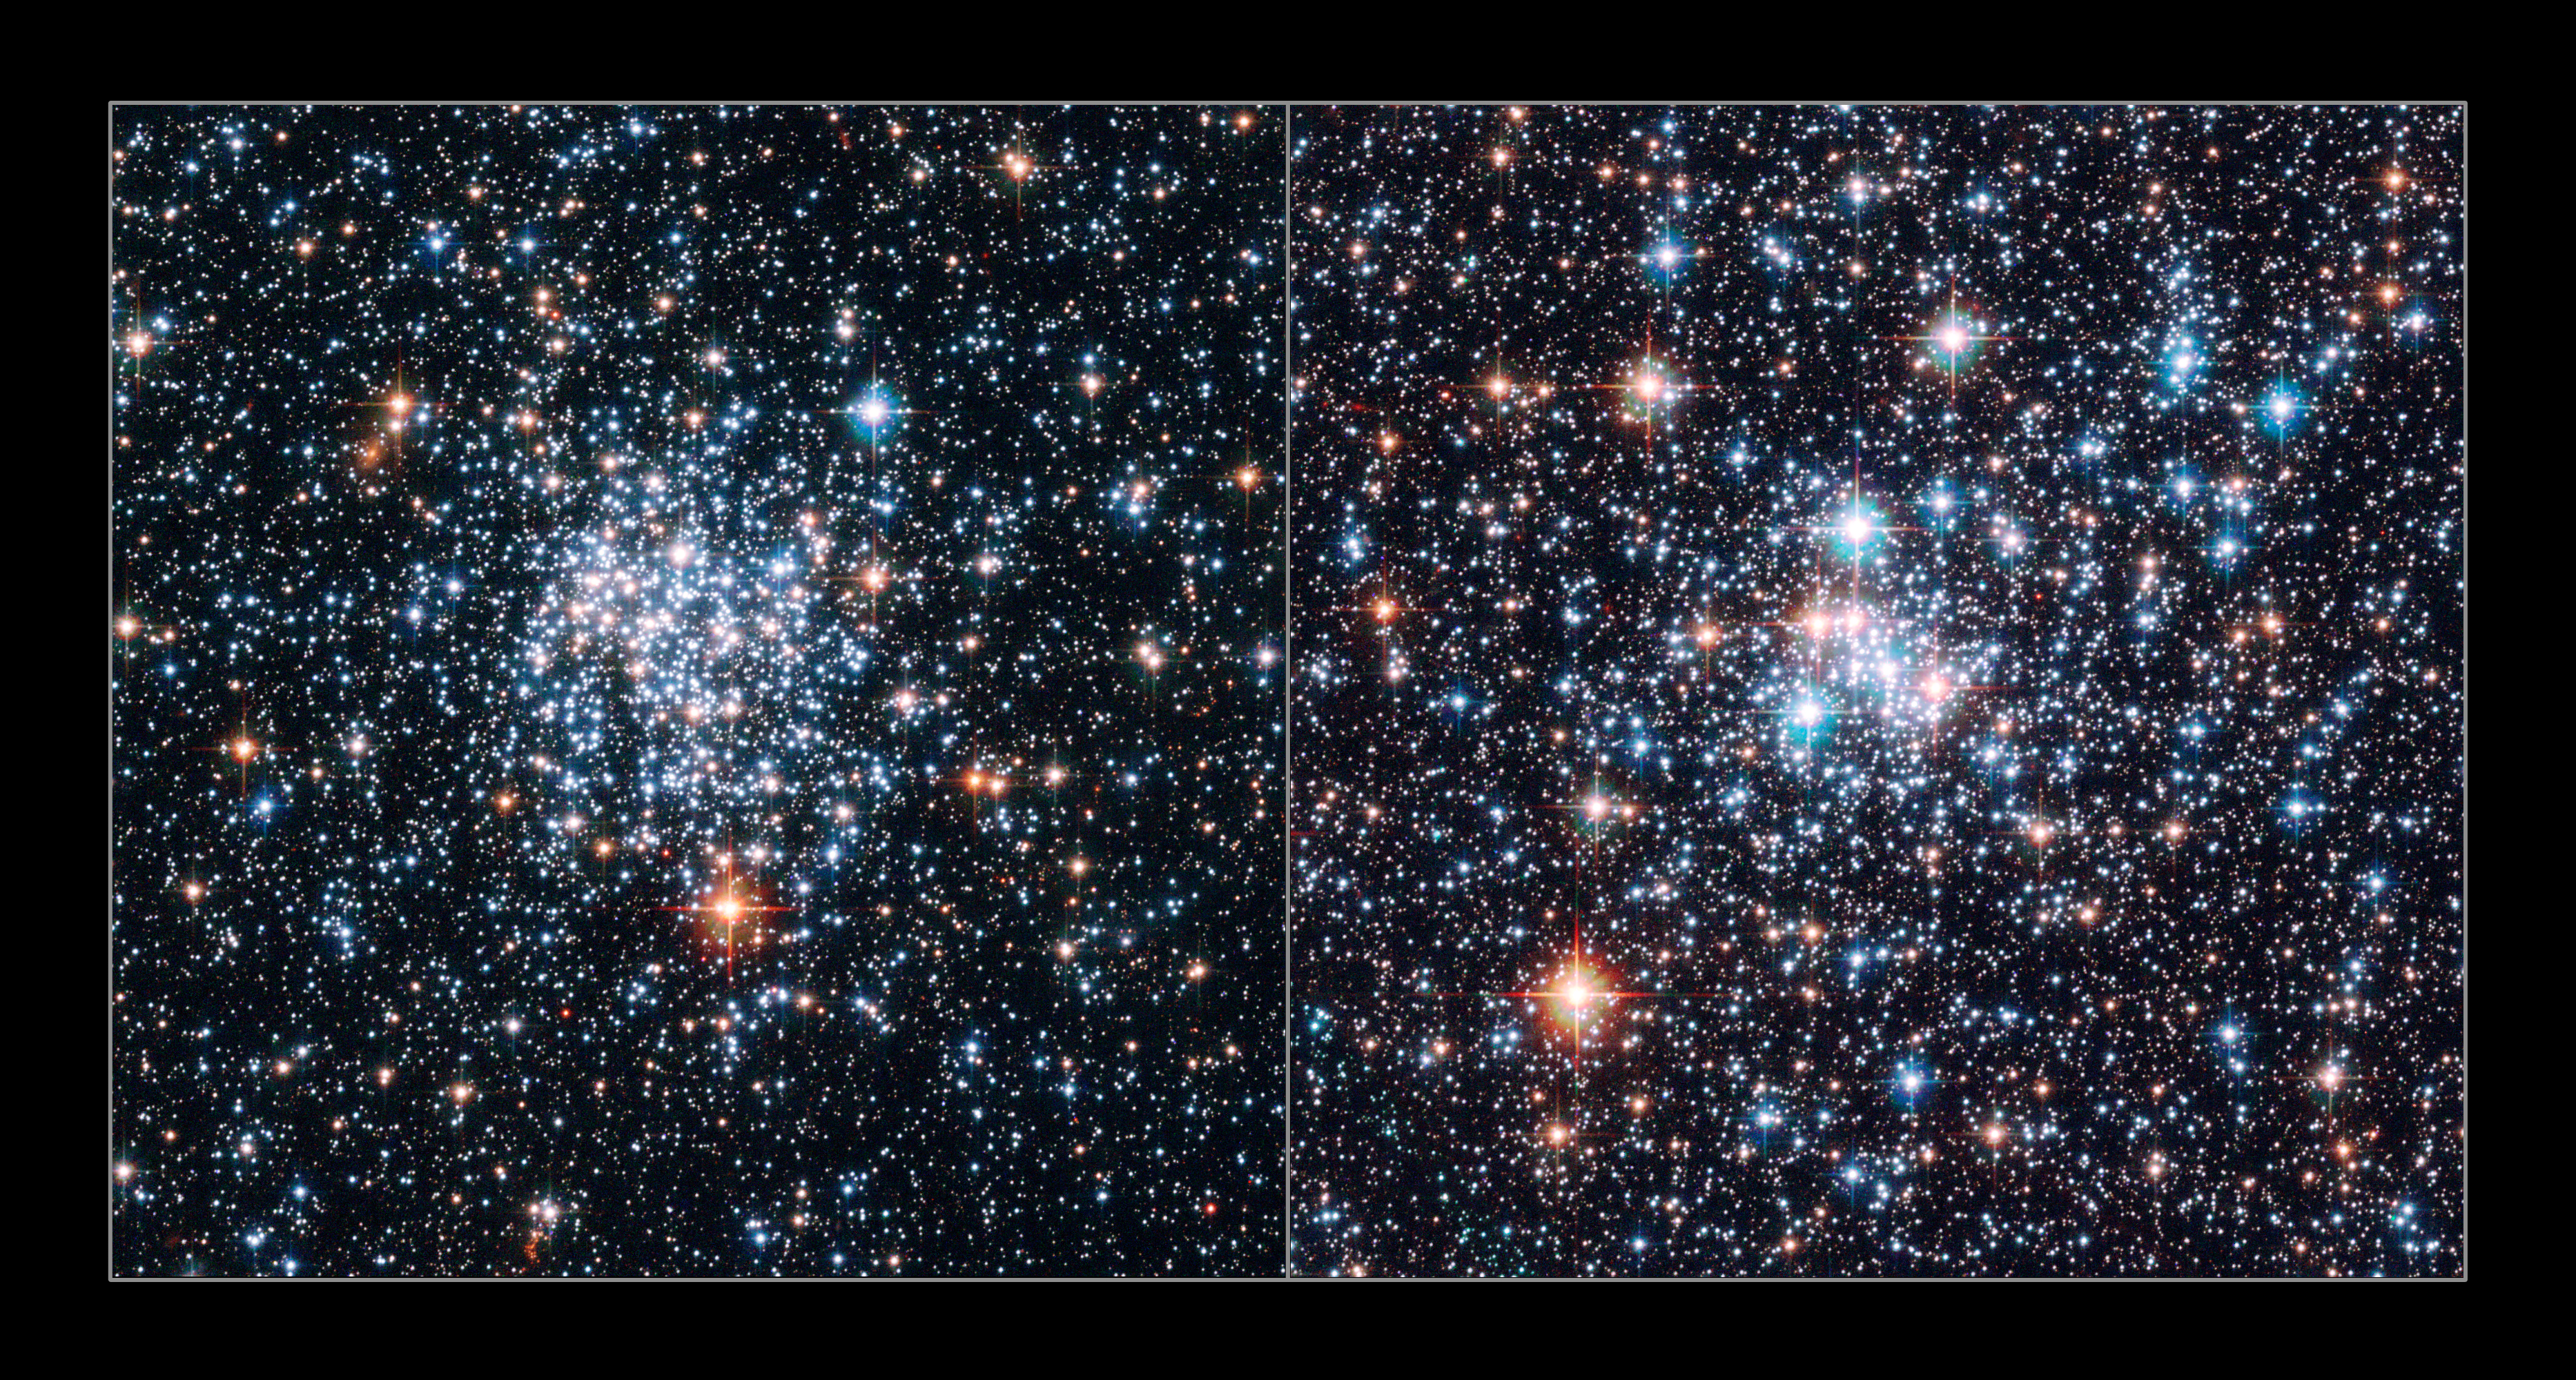

Magellanic gemstones in the southern sky

Hubble has captured the most detailed images to date of the open star clusters NGC 265 and NGC 290 in the Small Magellanic Cloud - two sparkling sets of gemstones in the southern sky.

Two new composite images taken with the Advanced Camera for Surveys onboard the NASA/ESA Hubble Space Telescope show a myriad of stars in crystal clear detail. The brilliant open star clusters, NGC 265 and NGC 290, are located about 200,000 light-years away and are roughly 65 light-years across.

Credit: European Space Agency & NASA
Acknowledgements:
Davide De Martin (ESA/Hubble) and Edward W. Olszewski (University of Arizona, USA)